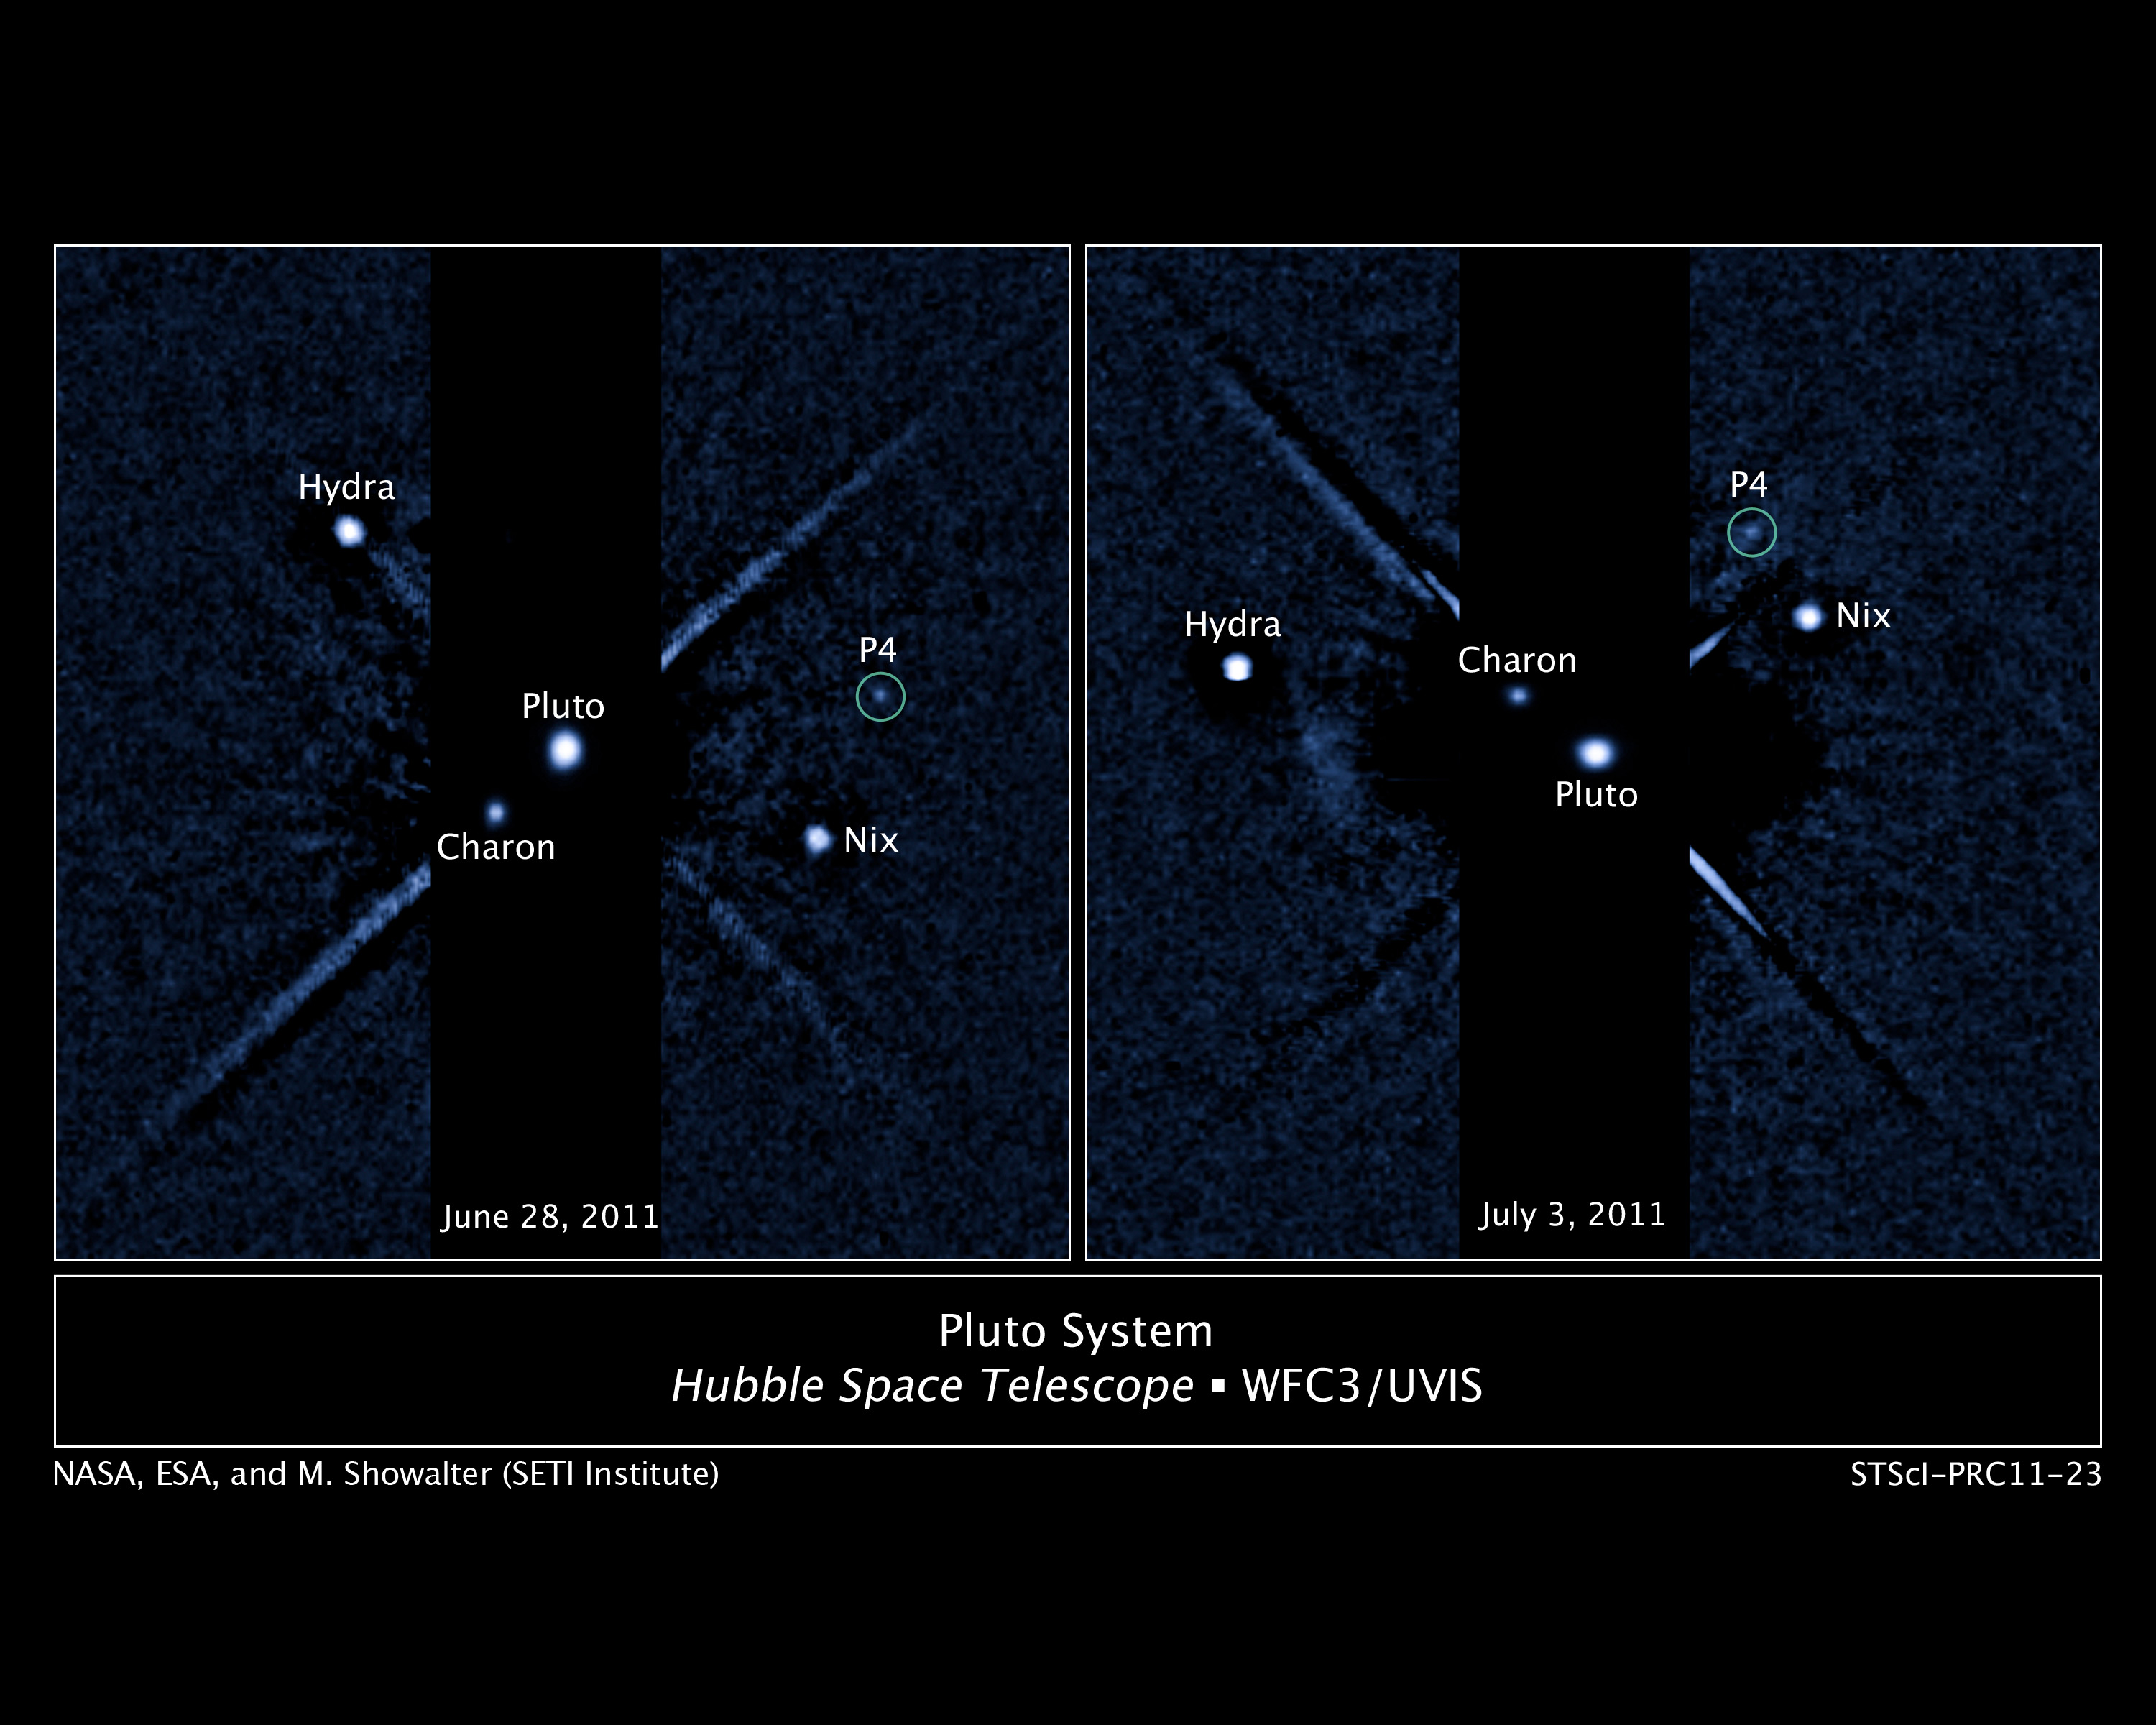

Pluto's moon system

These two images, taken about a week apart by the NASA/ESA Hubble Space Telescope, show four moons orbiting the distant, icy dwarf planet Pluto. The green circle in both snapshots marks the newly discovered moon, temporarily dubbed P4, found by Hubble in June.

P4 is the smallest moon yet found around Pluto, with an estimated diameter of 13 to 34 km. By comparison, Pluto's largest moon Charon is 1,043 km across. Nix and Hydra are roughly 32 to 113 km wide.

The new moon lies between the orbits of Nix and Hydra, two satellites discovered by Hubble in 2005. It completes an orbit around Pluto roughly every 31 days.

The moon was first seen in a photo taken with Hubble's Wide Field Camera 3 on 28 June 2011. The sighting was confirmed in follow-up Hubble observations taken 3 July and 18 July.

P4, Nix, and Hydra are so small and so faint that scientists combined short and long exposures to create this image of Pluto and its entire moon system. The speckled background is camera "noise" produced during the long exposures. The linear features are imaging artifacts.

The tiny satellite was uncovered in a Hubble survey to search for rings around the frigid dwarf planet. The observations will help NASA's New Horizons mission, scheduled to fly through the Pluto system in 2015.

Credit: NASA, ESA, and M. Showalter (SETI Institute)